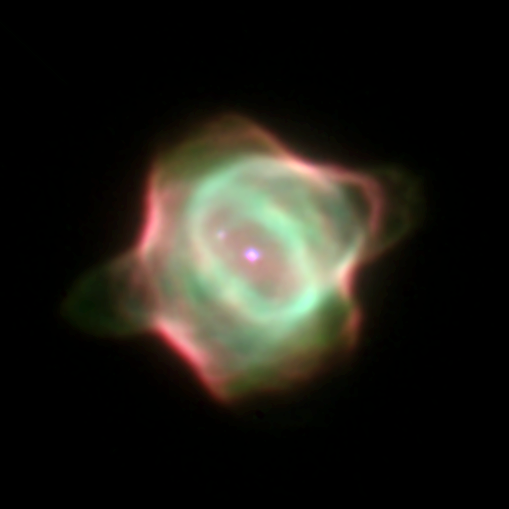

The Youngest Known Planetary Nebula

This Wide Field and Planetary Camera 2image captures the infancy of the Stingray nebula (Hen-1357), the youngest known planetary nebula.

In this image, the bright central star is in the middle of the green ring of gas. Its companion star is diagonally above it at 10 o'clock. A spur of gas (green) is forming a faint bridge to the companion star due to gravitational attraction.

Credit: Matt Bobrowsky, Orbital Sciences Corporation and NASA/ESA